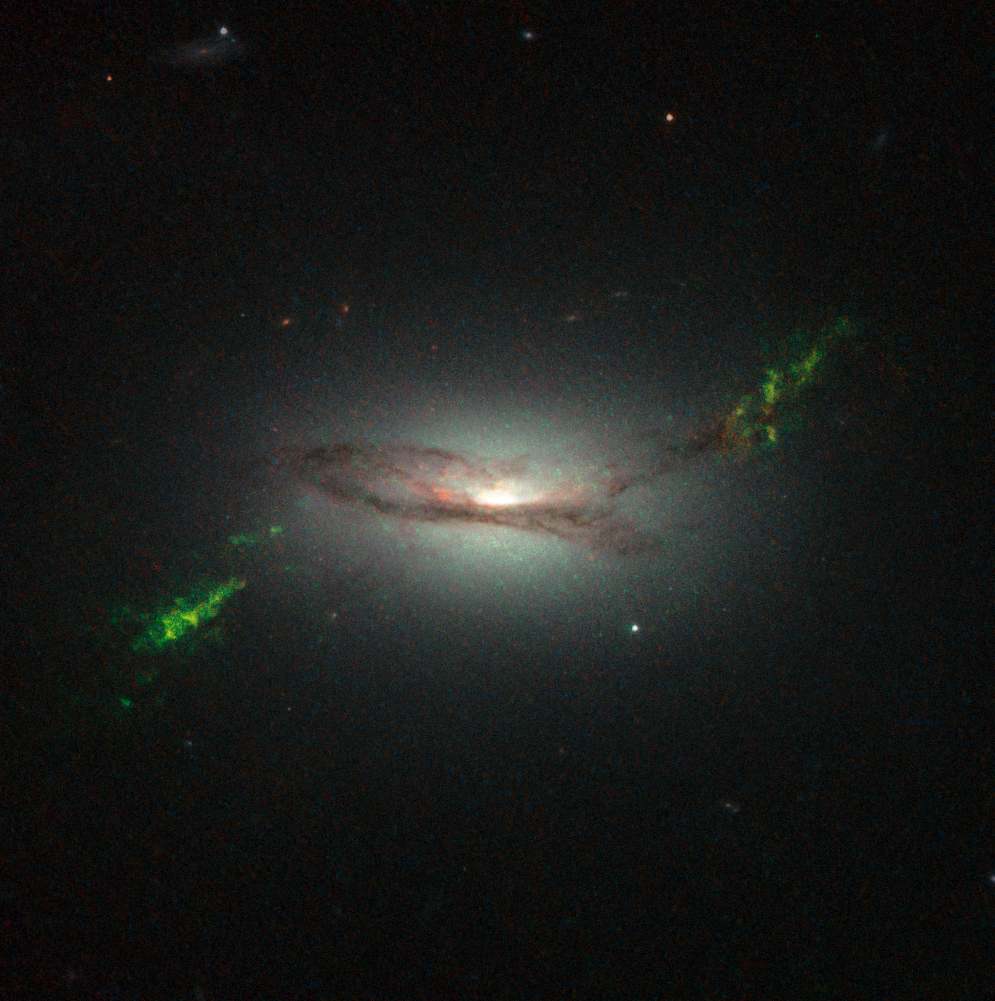

Hubble view of green filament in galaxy 2MASX J22014163+1151237

This new NASA/ESA Hubble Space Telescope image shows ghostly green filaments, lying within galaxy 2MASX J22014163+1151237. This filament was illuminated by a blast of radiation from a quasar — a very luminous and compact region that surrounds the supermassive black hole at the centre of its host galaxy.

Its bright green hue is a result of ionised oxygen, which glows brightly at green wavelengths.

Credit: NASA, ESA, W. Keel (University of Alabama, USA)